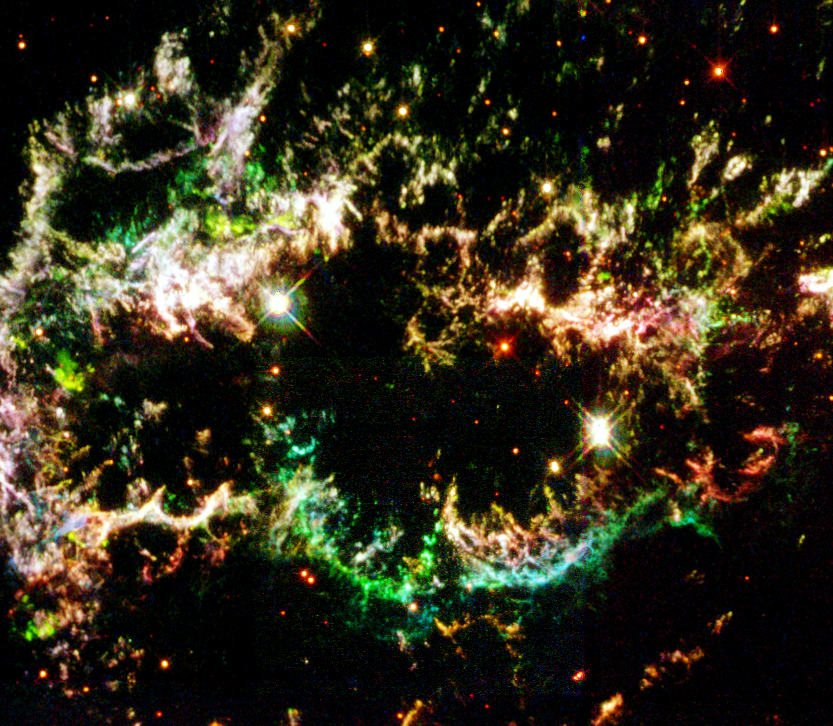

Details of Supernova Remnant Cassiopeia A

This is a section of Cassiopeia A, the youngest known supernova remnant in our Milky Way Galaxy. These streamer like remains of an exploding star are 10,000 light-years away in the constellation Cassiopeia and were first observed from Earth 320 years ago.

Credit: NASA/ESA and the Hubble Heritage Team (STScI/AURA)